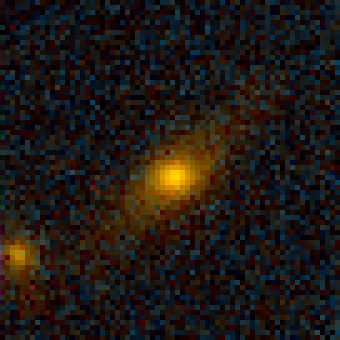

Galaxy Cluster MS1054-03

Exciting Hubble Space Telescope images of more than a dozen very distant colliding galaxies indicate that, at least in some cases, big massive galaxies form through collisions between smaller ones, in a 'generation after generation' never-ending story.

Credit: ESA/NASA, Pieter van Dokkum (University of Groningen/Leiden), Marijn Franx (University of Groningen/Leiden)